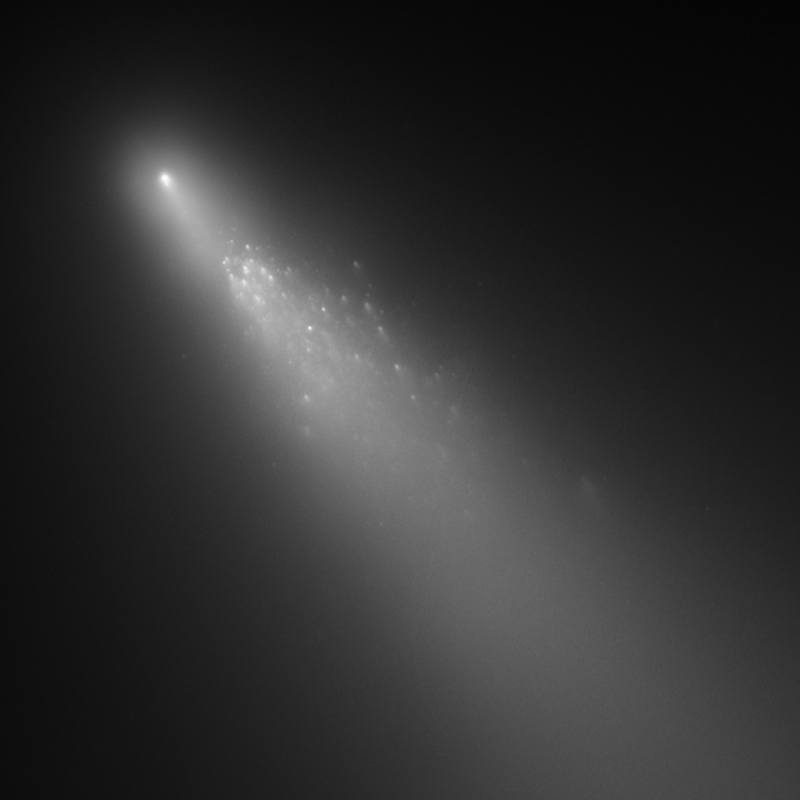

Comet 73P/Schwassmann-Wachmann 3 - Fragment B [19 April 2006]

The second image from a three-day observation with Hubble showing the breakup of Comet 73P/Schwassmann-Wachmann 3's Fragment B.

Credit: NASA, ESA, H. Weaver (APL/JHU), M. Mutchler and Z. Levay (STScI)